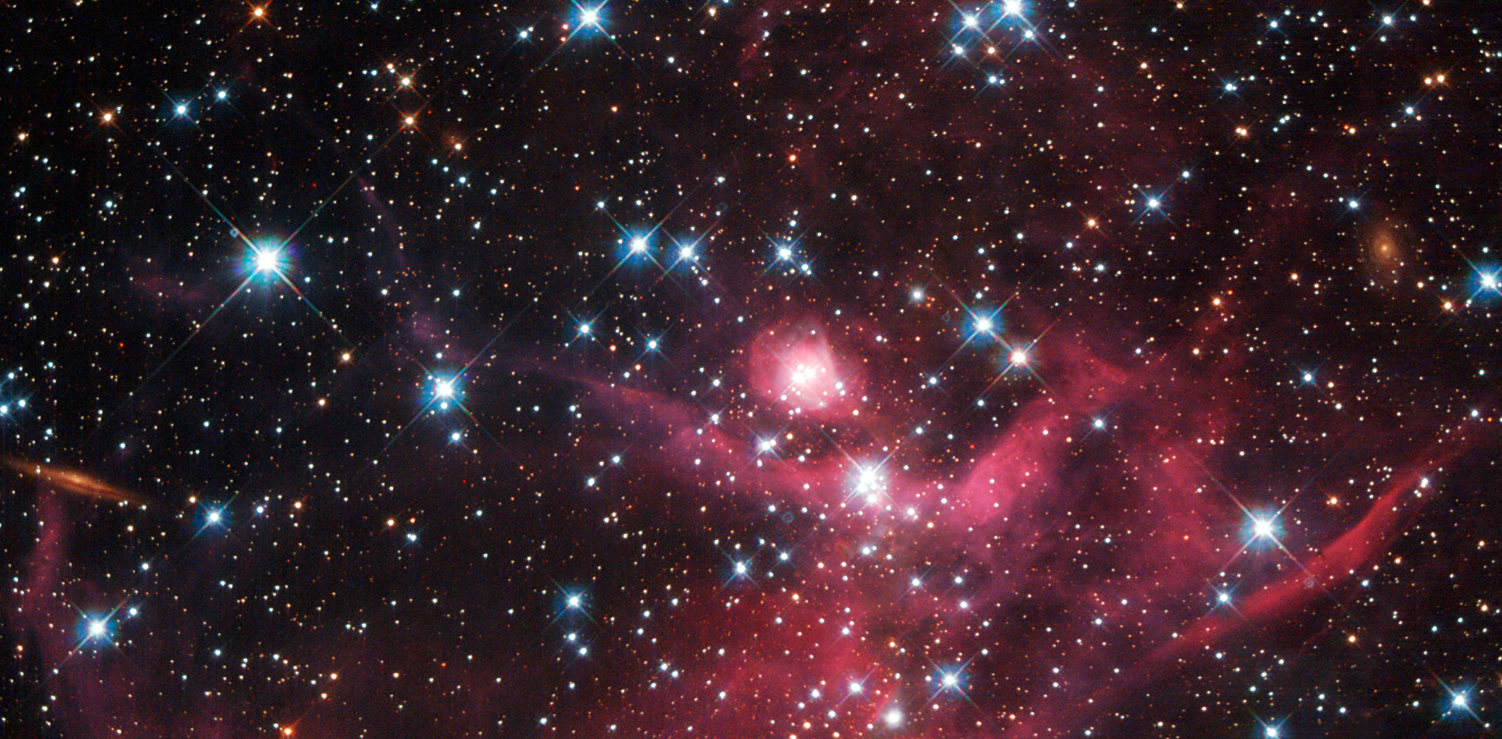

Cloaked in red

This stunning new Hubble image shows a small part of the Large Magellanic Cloud, one of the closest galaxies to our own. This collection of small baby stars, most weighing less than the Sun, form a young stellar cluster known as LH63. This cluster is still half-embedded in the cloud from which it was born, in a bright star-forming region known as the emission nebula LHA 120-N 51, or N51. This is just one of the hundreds of star-forming regions filled with young stars spread throughout the Large Magellanic Cloud.

The burning red intensity of the nebulae at the bottom of the picture illuminates wisps of gas and dark dust, each spanning many light-years. Moving up and across, bright stars become visible as sparse specks of light, giving the impression of pin-pricks in a cosmic cloak.

This patch of sky was the subject of observation by Hubble's WFPC2 camera. Looking for and at low-mass stars can help us to understand how stars behave when they are in the early stages of formation, and can give us an idea of how the Sun might have looked billions of years ago.

A version of this image was submitted to the Hubble's Hidden Treasures image processing competition by contestant Luca Limatola.

Credit: NASA, ESA, and D. Gouliermis (University of Heidelberg) Acknowledgement: Luca Limatola